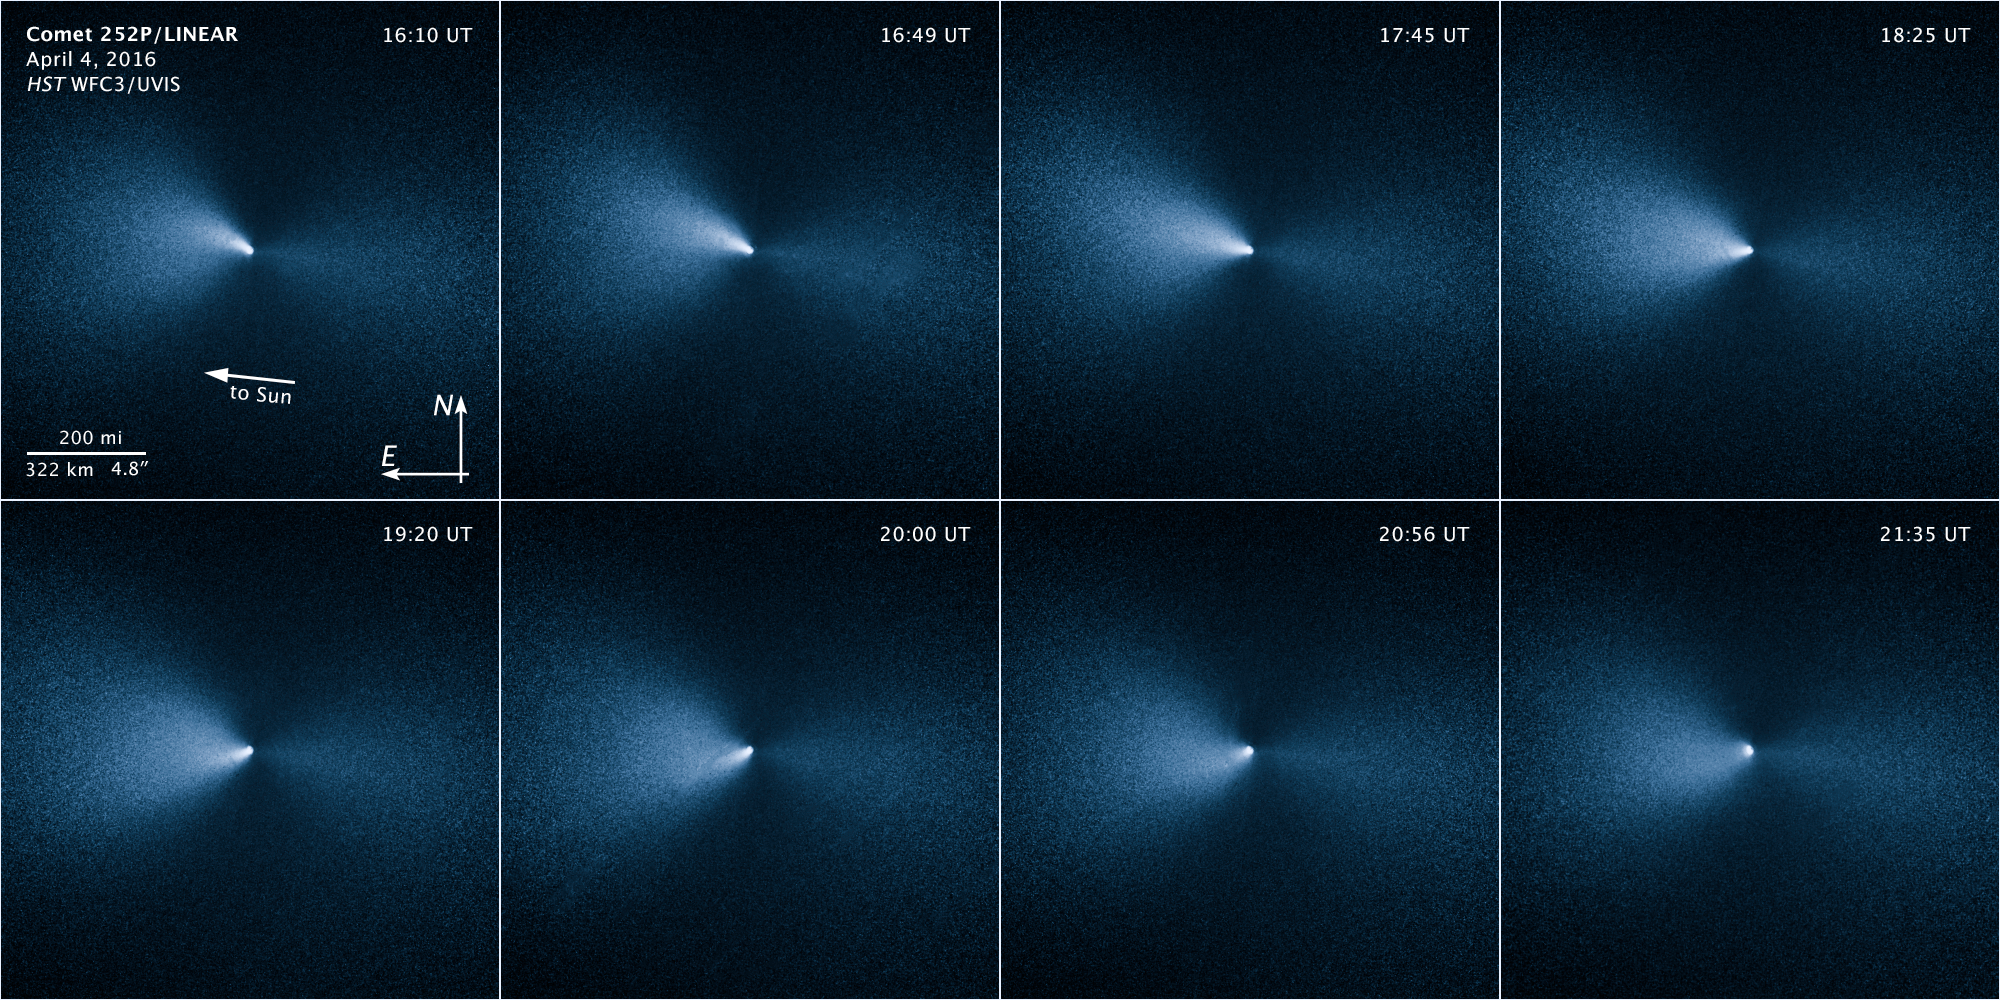

opo1614e

This sequence of images taken by the NASA/ESA Hubble Space Telescope shows Comet 252P/LINEAR as it passed by Earth. The visit was one of the closest encounters between a comet and our planet

Credit: NASA, ESA, and J.-Y. Li (Planetary Science Institute)